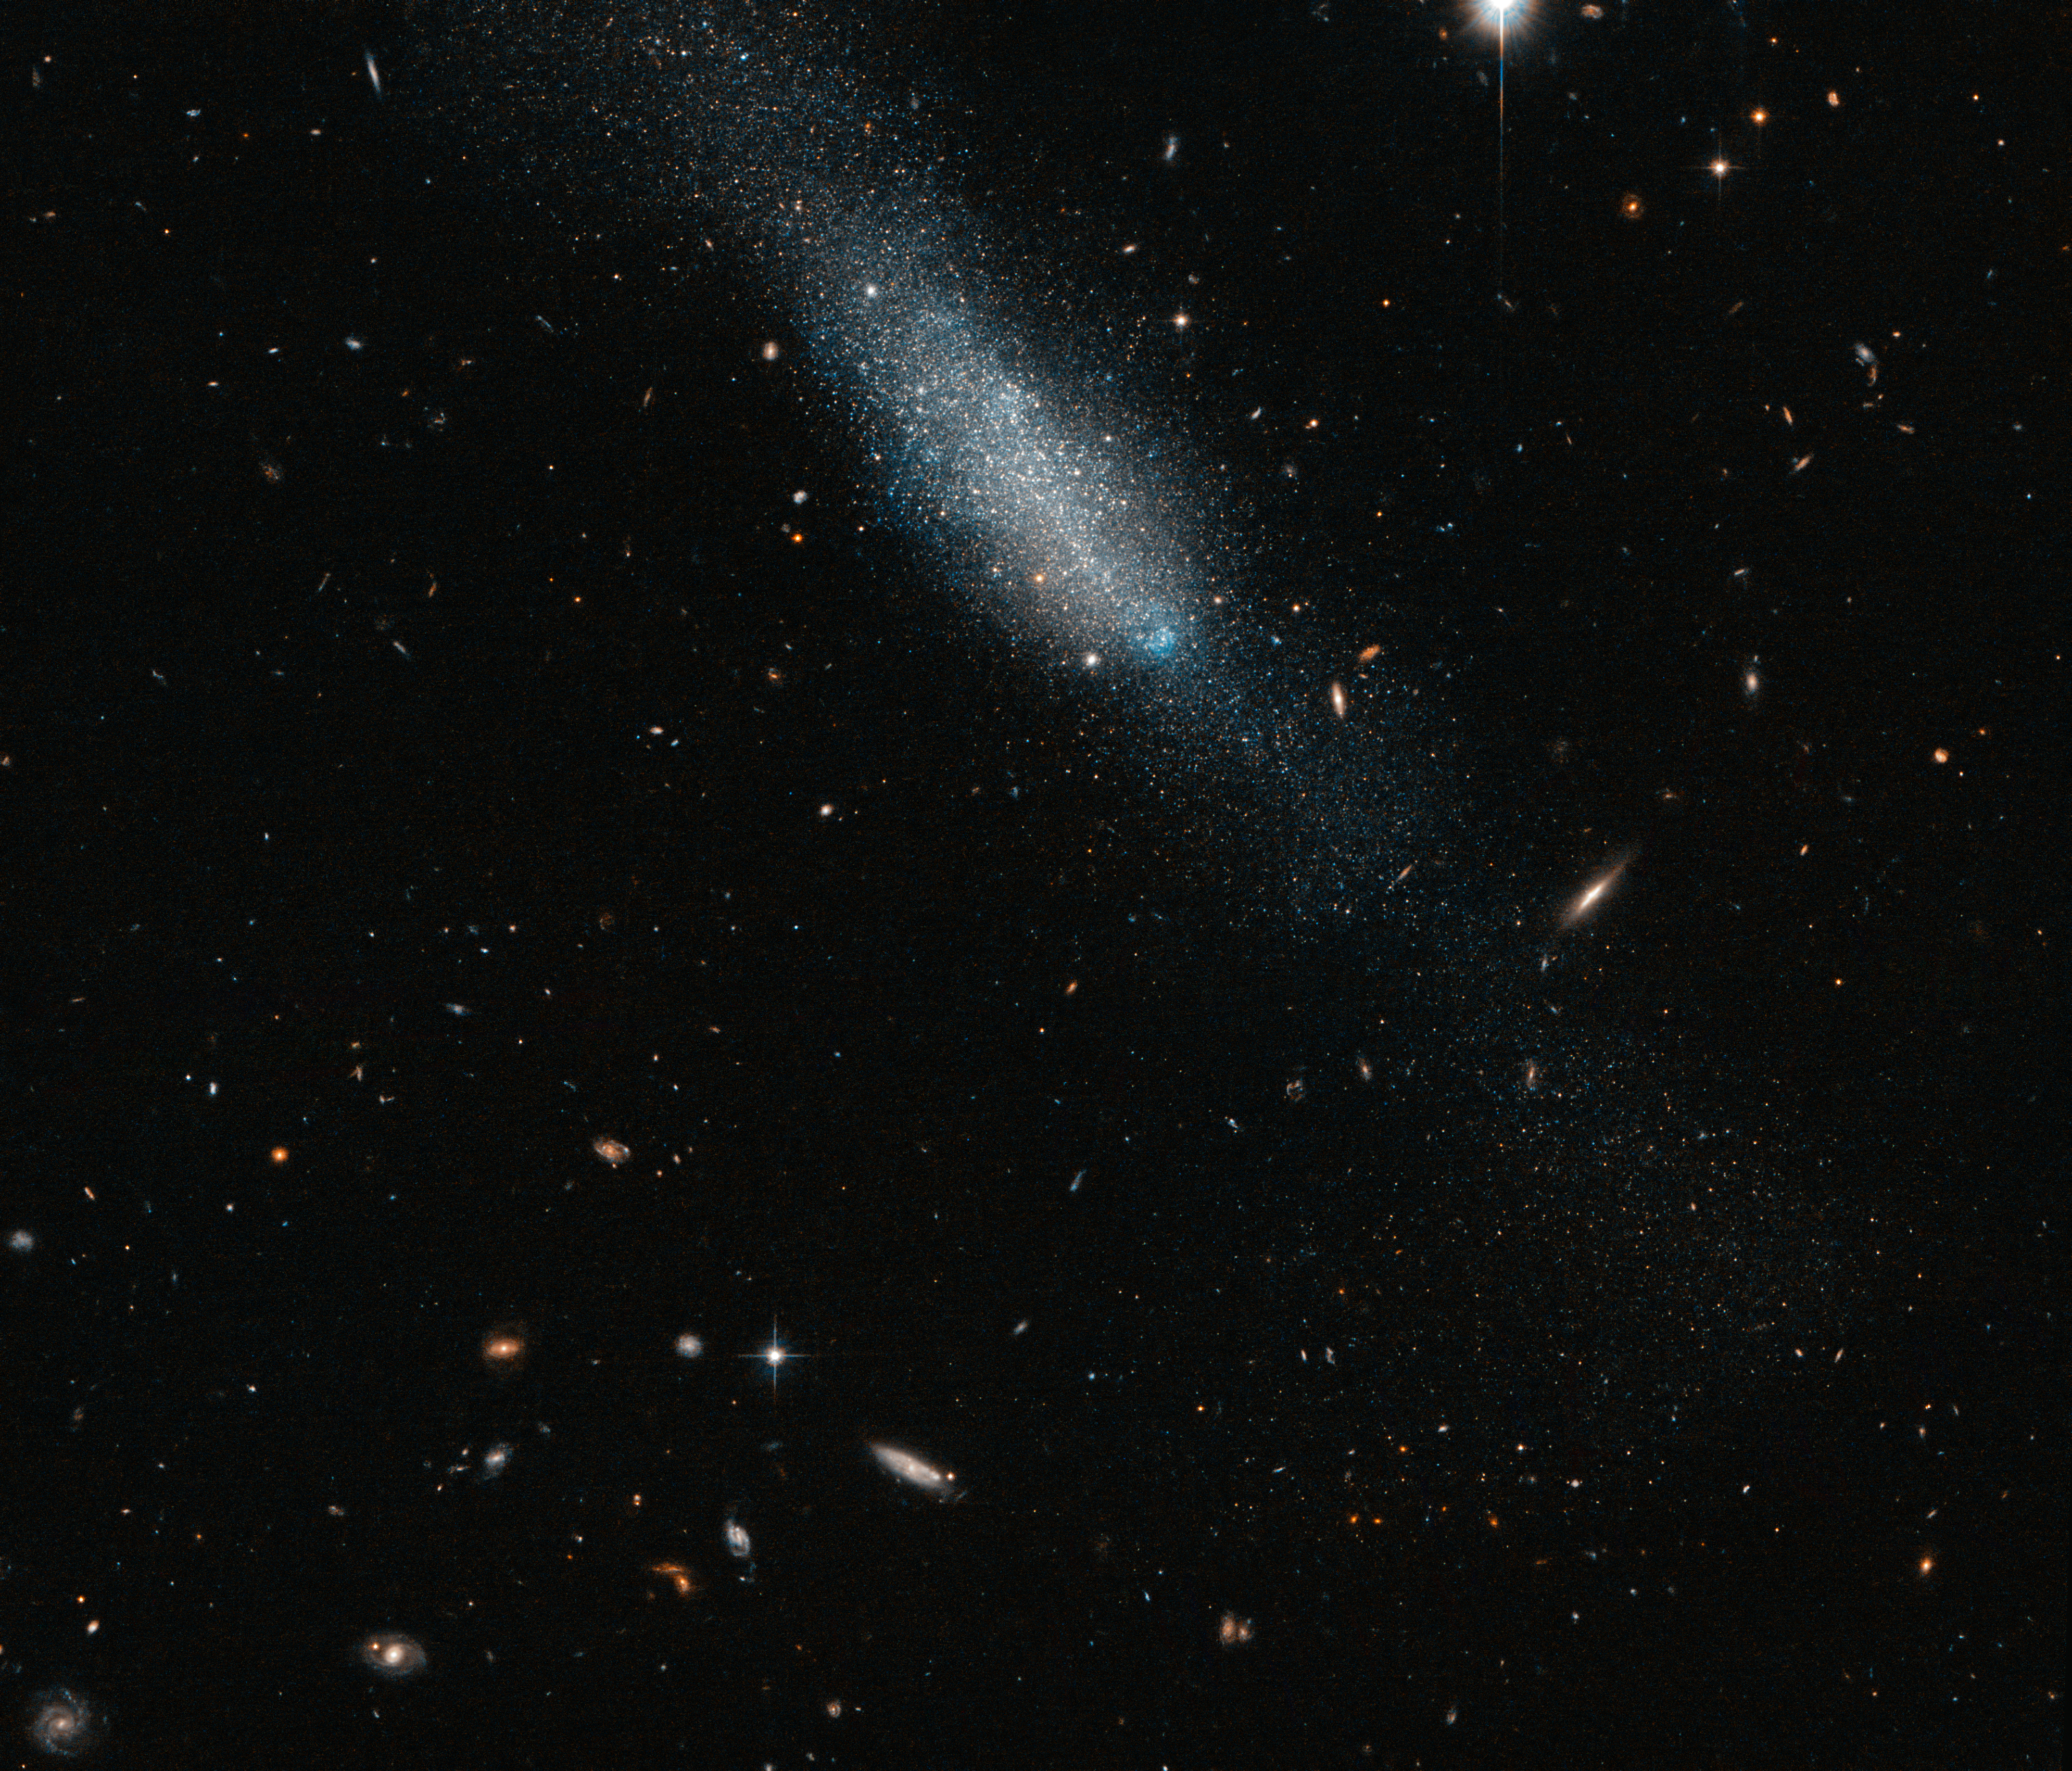

Blue and gold

This sprinkling of cosmic glitter makes up the galaxy known as ESO 149-3, located some 20 million light-years away from us. It is an example of an irregular galaxy, characterised by its amorphous, undefined shape — a property that sets it apart from its perhaps more photogenic spiral and elliptical relatives. Around one quarter of all galaxies are thought to be irregular-type galaxies.

In this image taken with the NASA/ESA Hubble Space Telescope ESO 149-3 can be seen as a smattering of golden and blue stars, with no apparent central nucleus or arm structure. The surrounding sky is rich in other more distant galaxies, visible as small, colourful streaks and dashes.

A version of this image was submitted to the Hubble's Hidden Treasures image processing competition by contestant Luca Limatola.

Credit: ESA/Hubble & NASA Acknowledgement: Luca Limatola